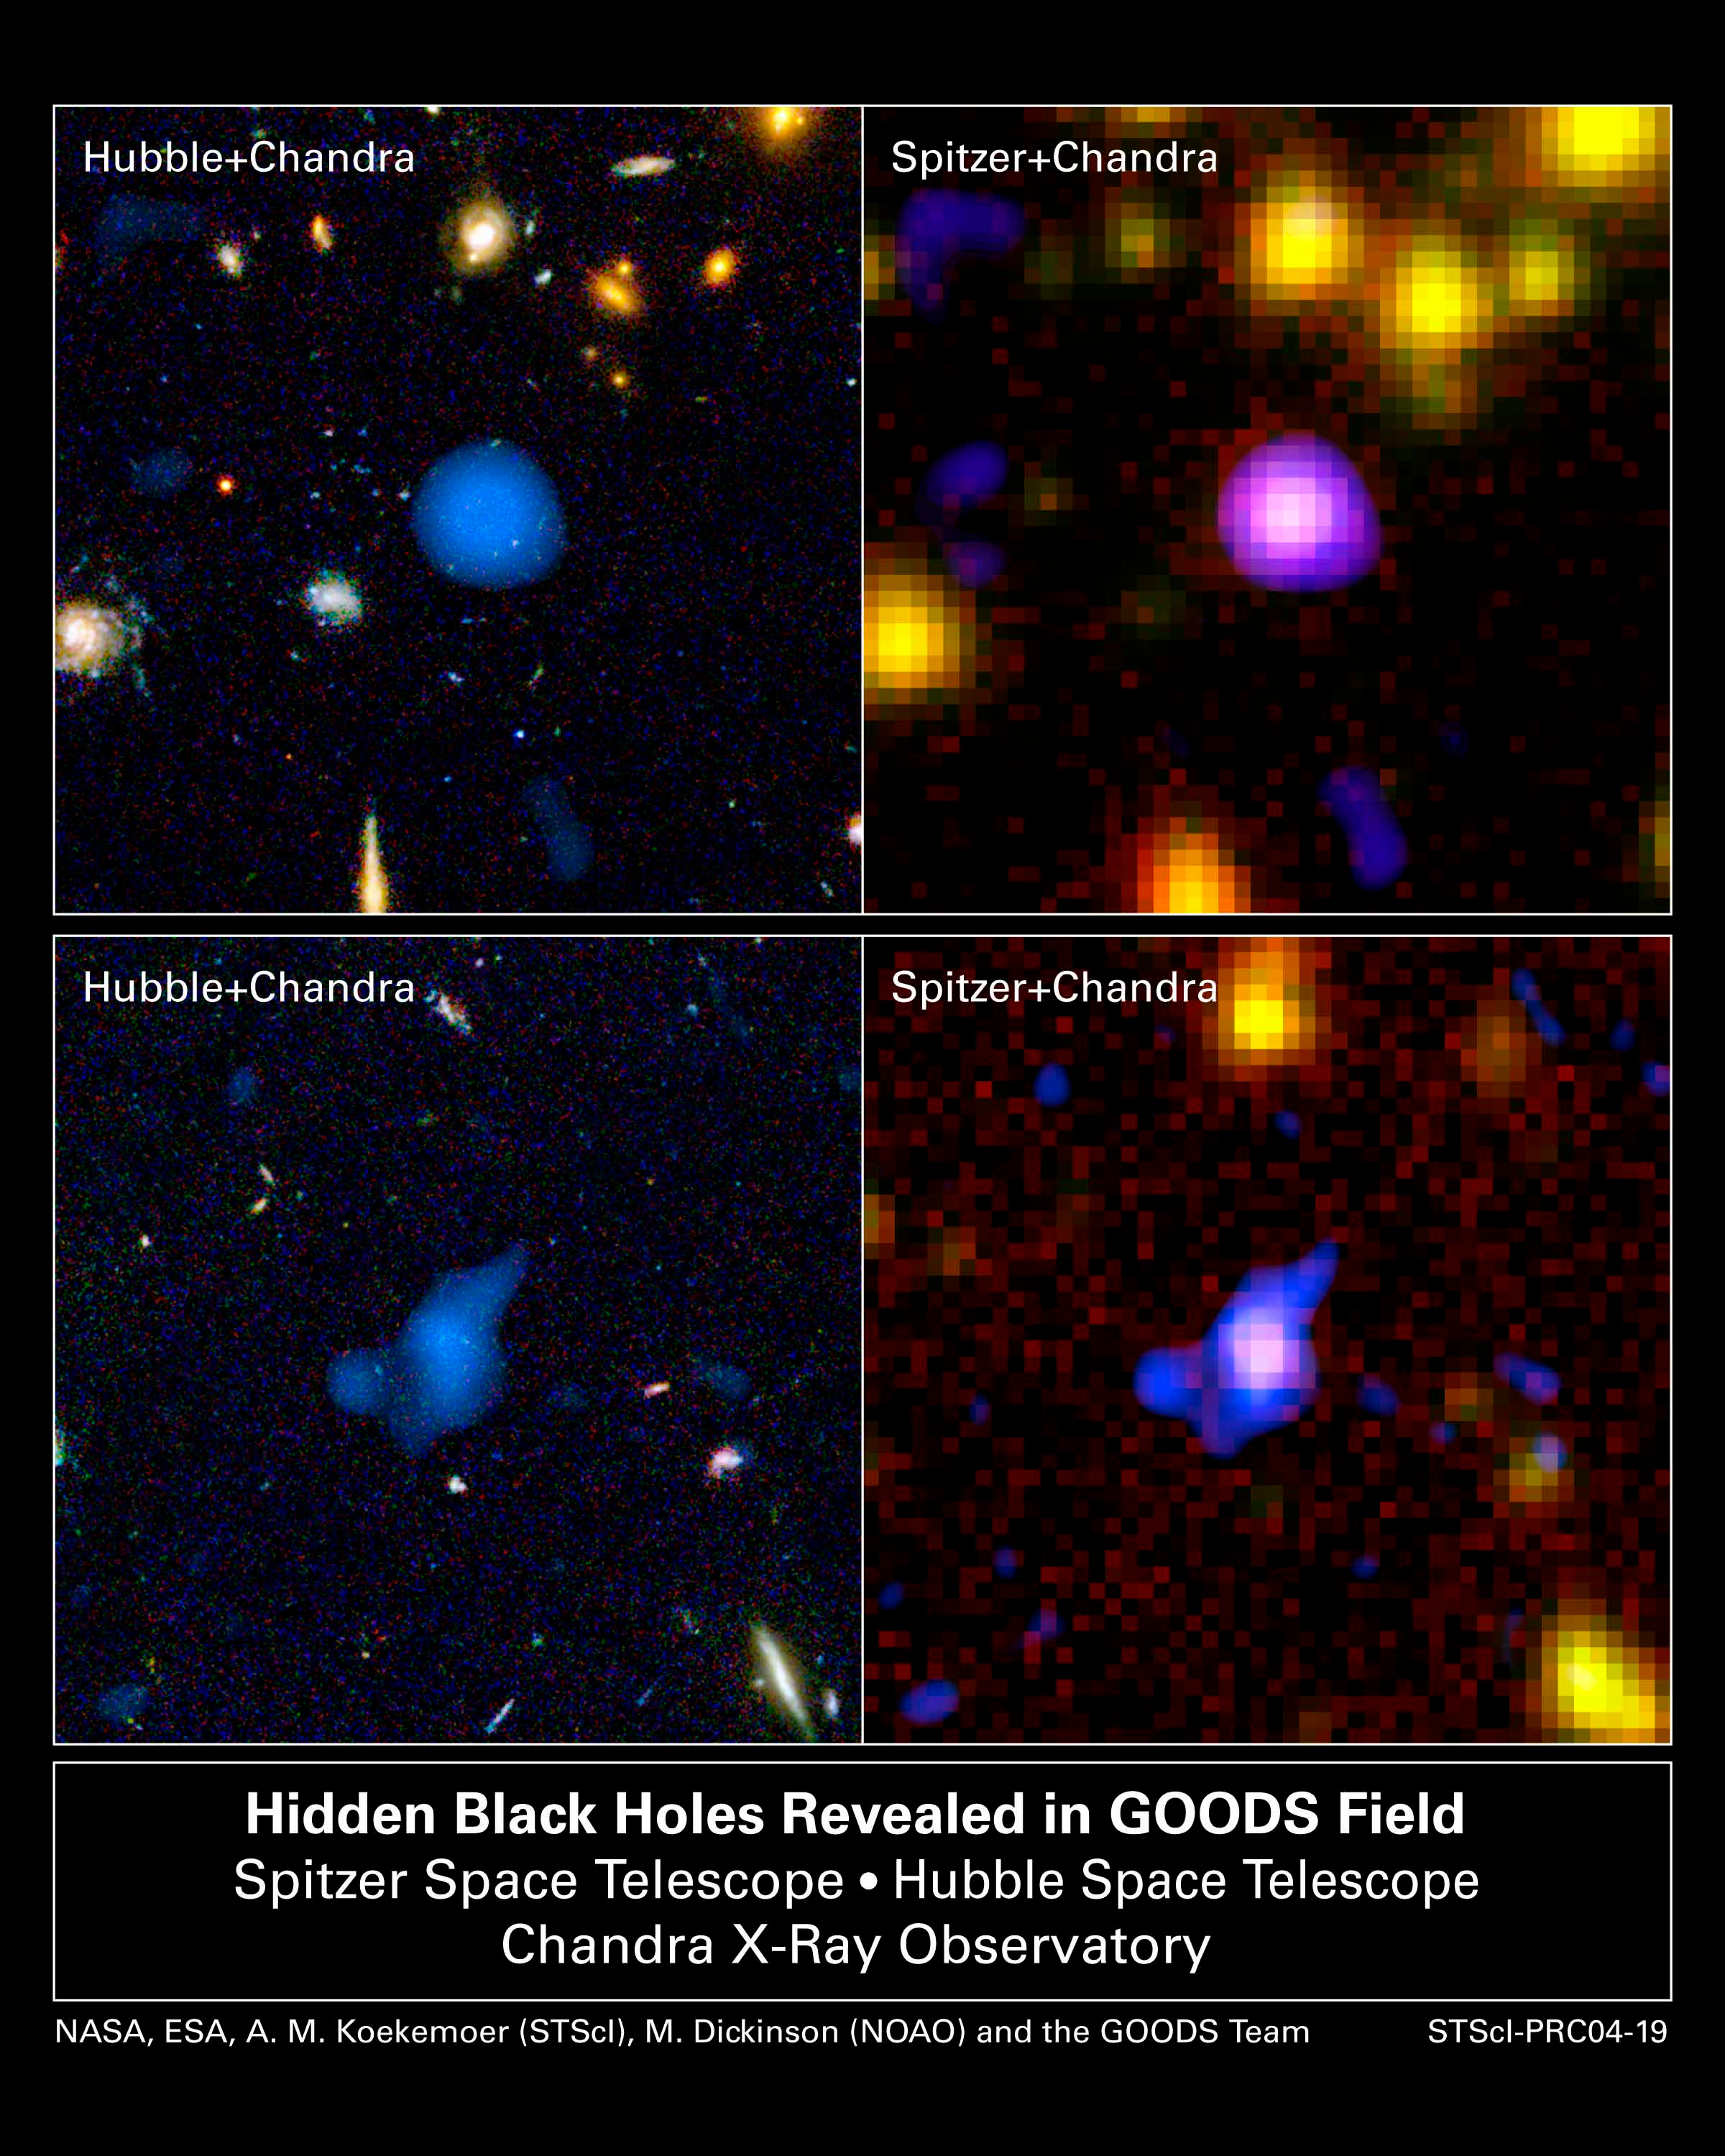

Hidden black holes revealed in GOODS field

The combined power of NASA's Great Observatories - the Hubble Space Telescope, the Chandra X-ray Observatory, and the Spitzer Space Telescope - have been combined to find a hidden population of supermassive black holes in the universe. It took the penetrating view of Spitzer to finally uncover the black holes and their surrounding galaxies.

Credit: NASA, ESA, A. M. Koekemoer (STScI), M. Dickinson (NOAO) and The GOODS Team